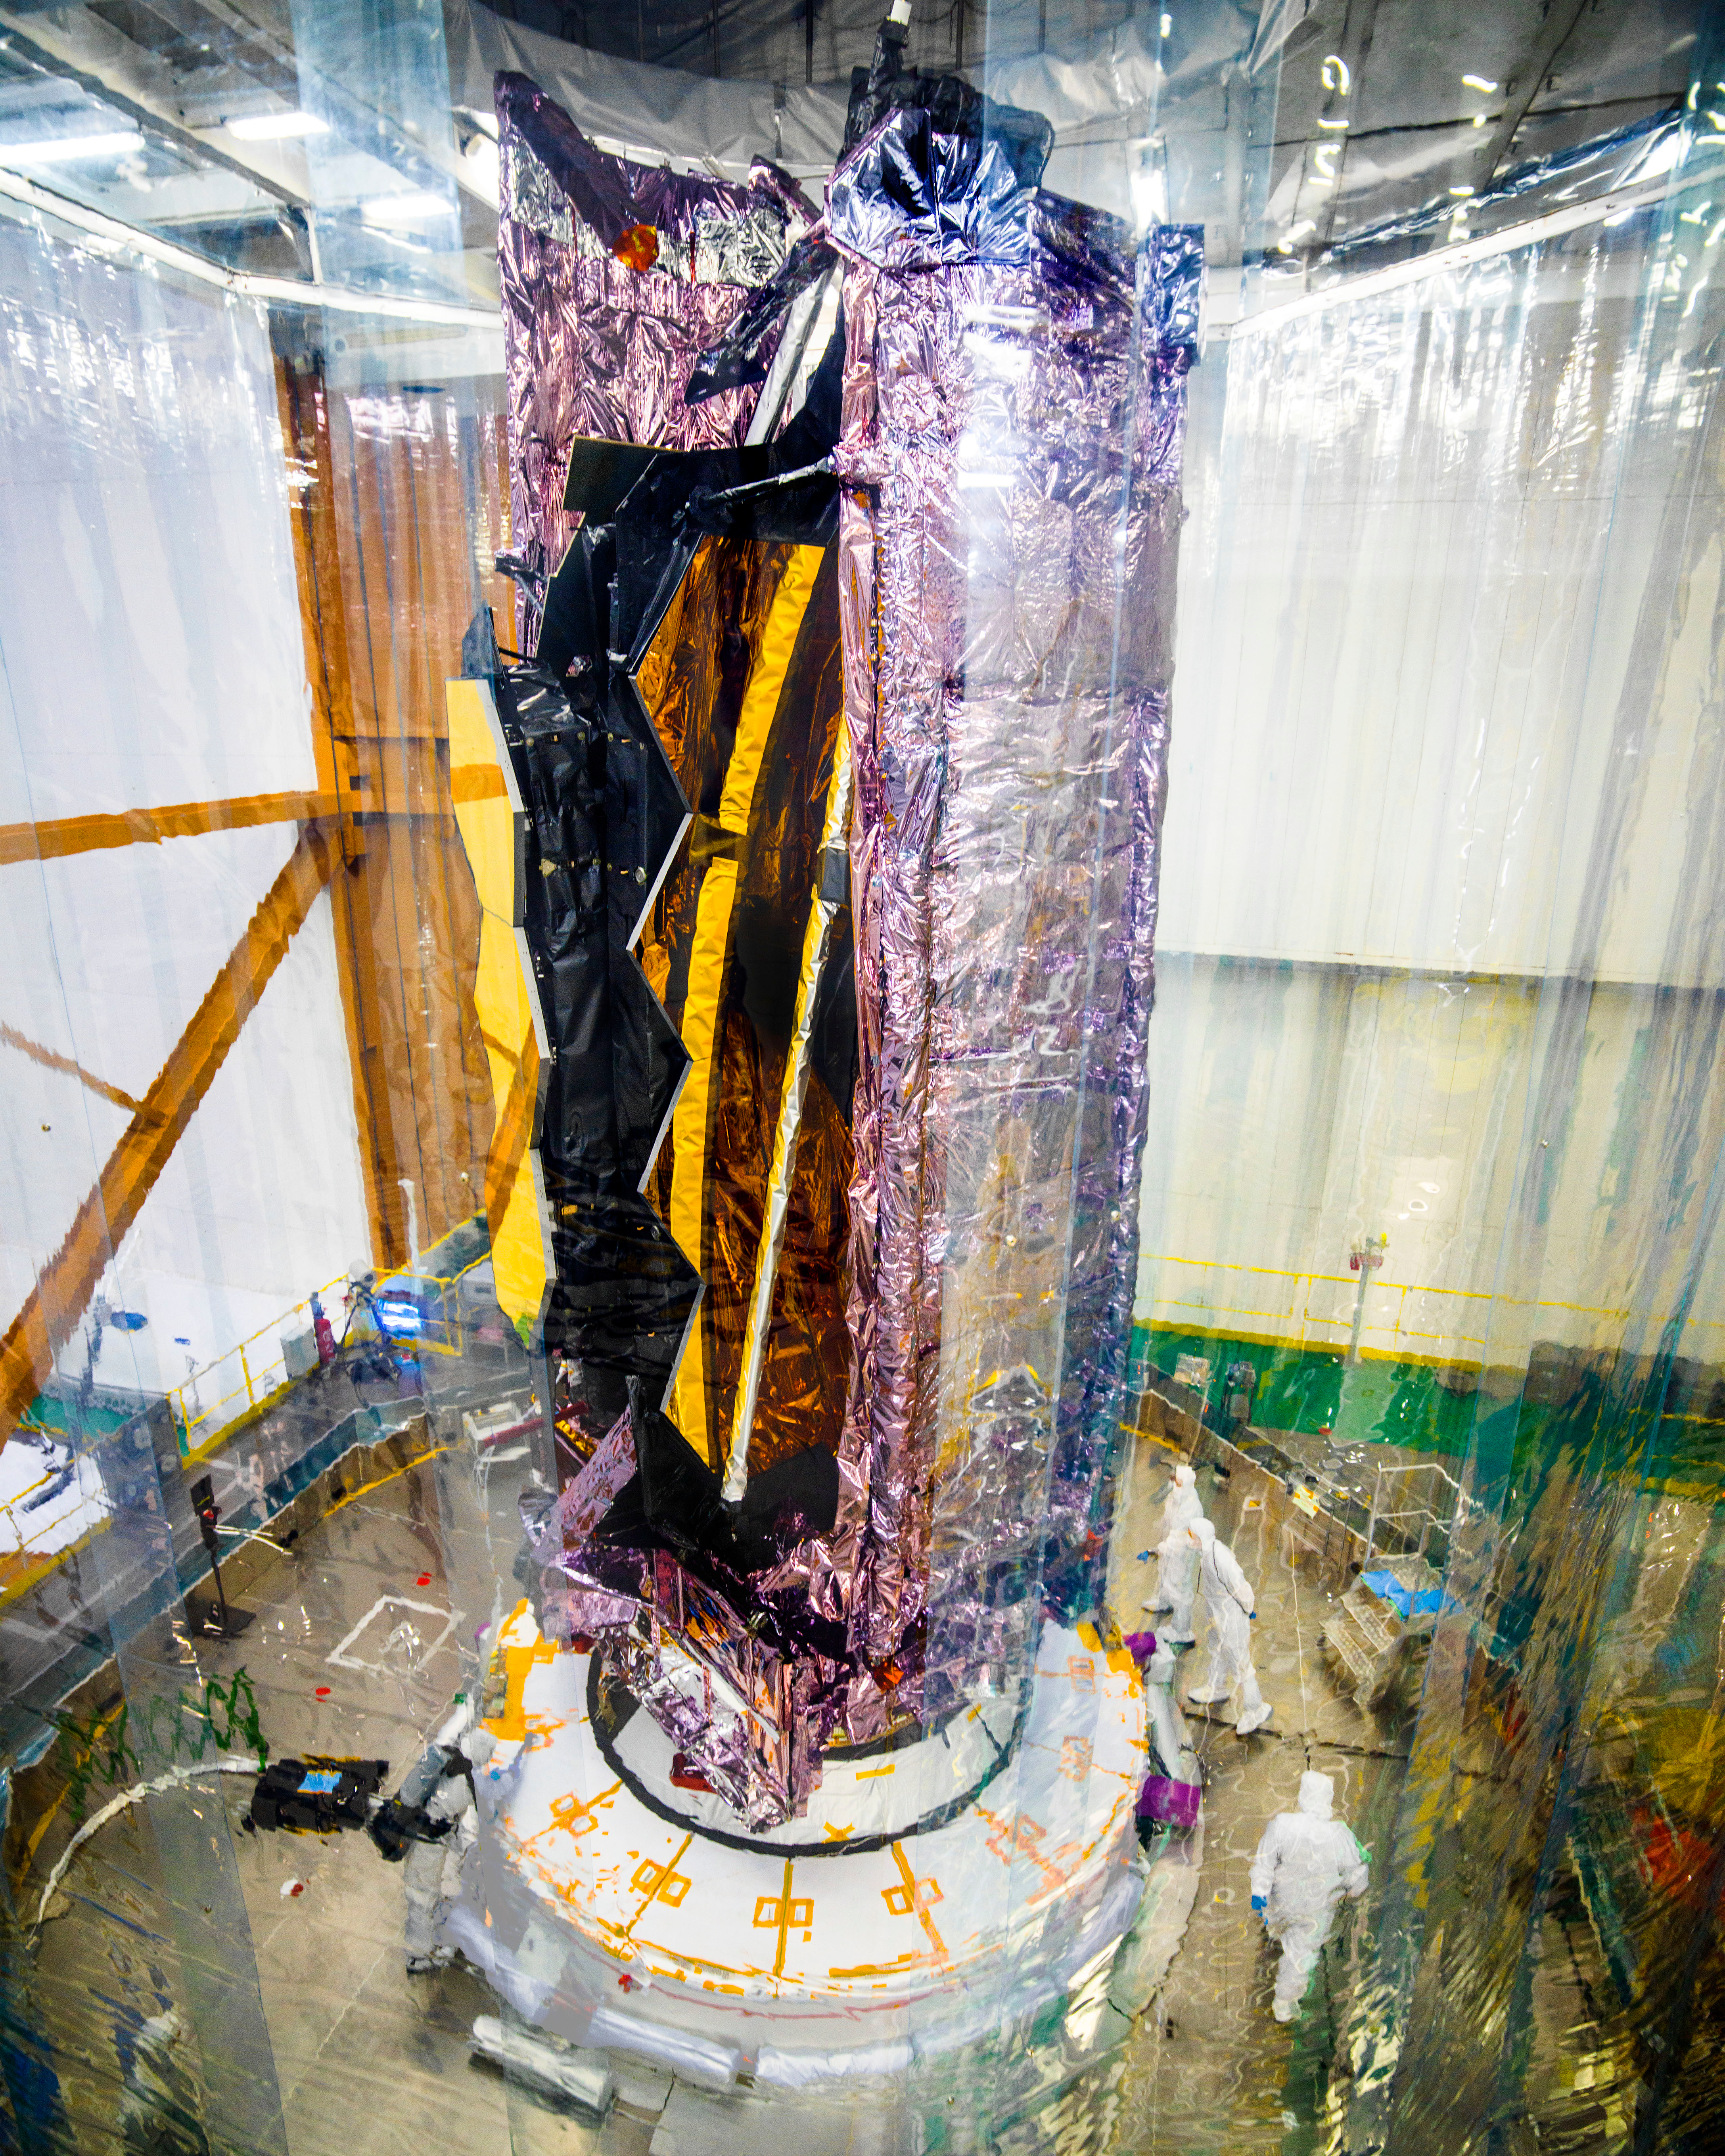

James Webb Space Telescope on Launcher

This image shows the James Webb Space Telescope atop its launch vehicle, but before it was encapsulated in the rocket fairing. You can see a protective clean tent around the telescope.

Credit: NASA/Chris Gunn